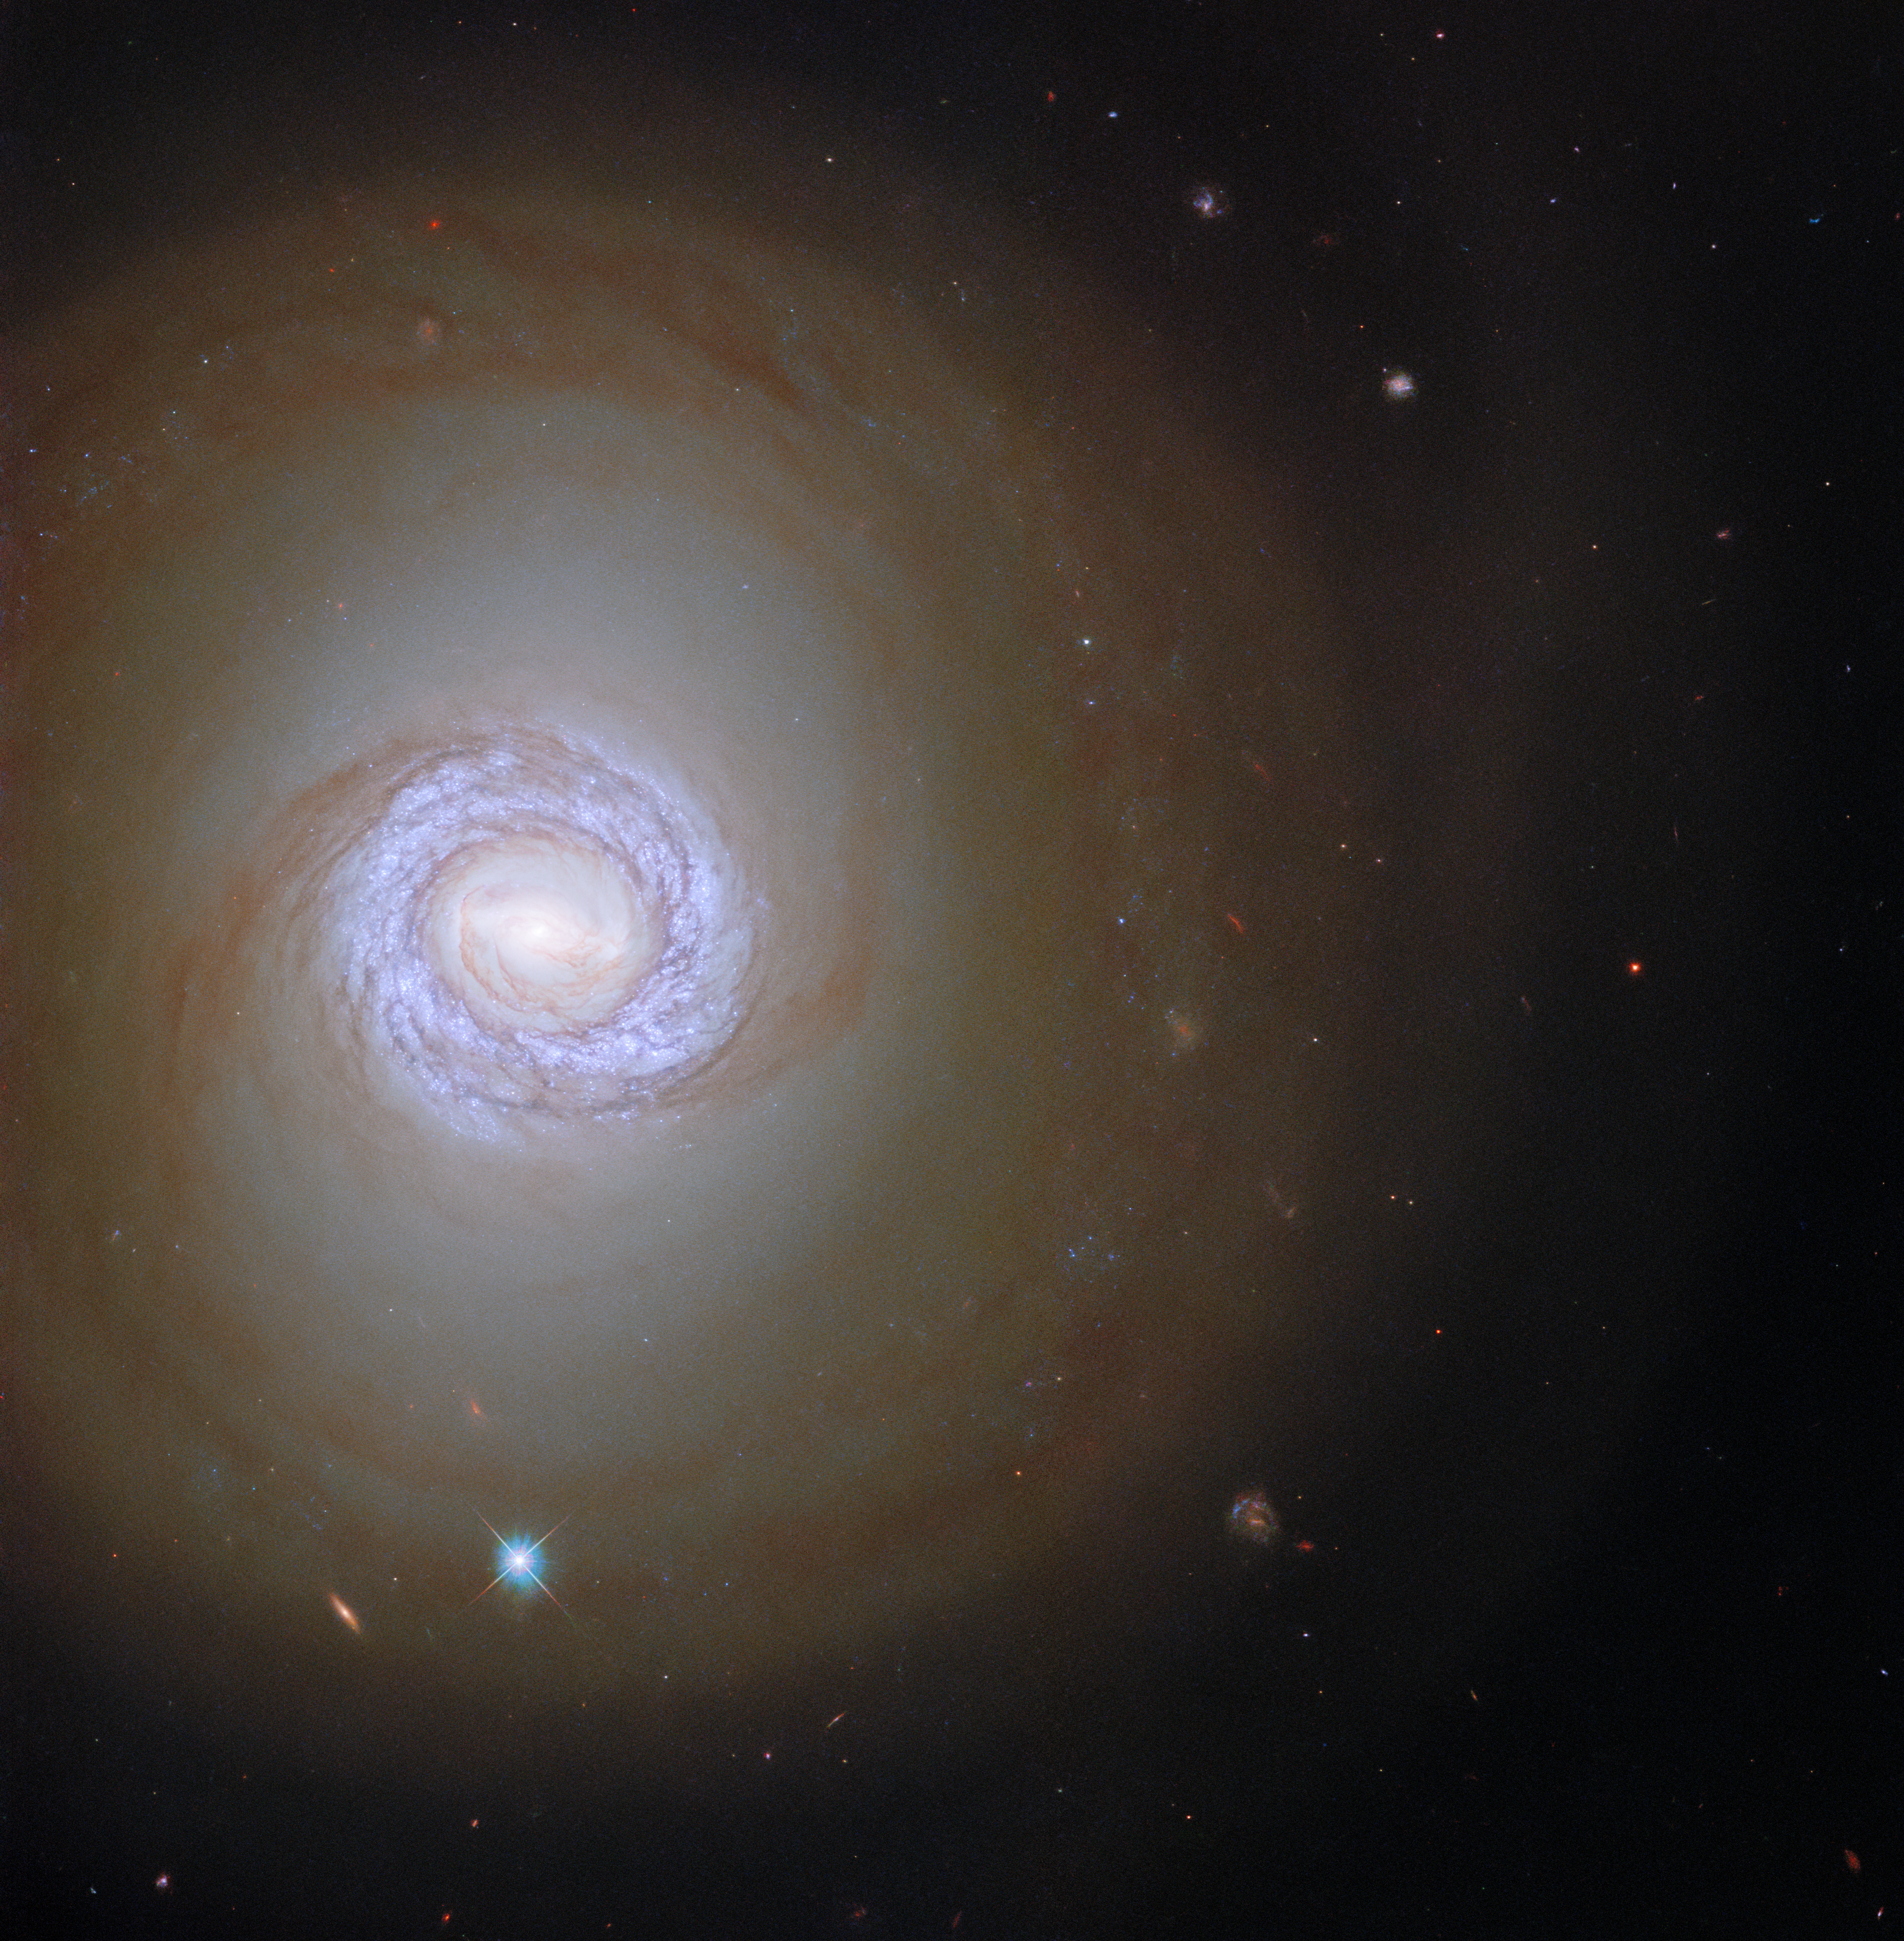

One of a Pair

In this image the NASA/ESA Hubble Space Telescope peers into the spiral galaxy NGC 1317 in the constellation Fornax, more than 50 million light-years from Earth. This galaxy is one of a pair, but NGC 1317’s rowdy larger neighbour NGC 1316 lies outside Hubble’s field of view. Despite the absence here of its neighbouring galaxy, NGC 1317 is accompanied in this image by two objects from very different parts of the Universe. The bright point ringed with a criss-cross pattern is a star from our own galaxy surrounded by diffraction spikes, whereas the redder elongated smudge is a distant galaxy lying far beyond NGC 1317.

The data presented in this image are from a vast observing campaign of hundreds of observations from Hubble’s Wide Field Camera 3 and Advanced Camera for Surveys. Combined with data from the ALMA array in the Atacama desert, these observations help astronomers chart the connections between vast clouds of cold gas and the fiercely hot young stars that form within them. ALMA’s unparalleled sensitivity at long wavelengths identified vast reservoirs of cold gas throughout the local Universe, and Hubble’s sharp vision pinpointed clusters of young stars, as well as measuring their ages and masses.

Often the most exciting astronomical discoveries require this kind of telescope teamwork, with cutting-edge facilities working together and providing astronomers with information across the electromagnetic spectrum. The same applies to future telescopes, with Hubble’s observations laying the groundwork for future science with the NASA/ESA/CSA James Webb Space Telescope.

Credit: ESA/Hubble & NASA, J. Lee and the PHANGS-HST Team